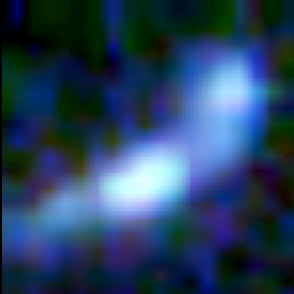

Galaxy building blocks

This is one Proto Galaxy out of a series of 18, taken by the Wide Field Planetary Camera 2.

Credit: Rogier Windhorst and Sam Pascarelle (Arizona State University) and NASA/ESA